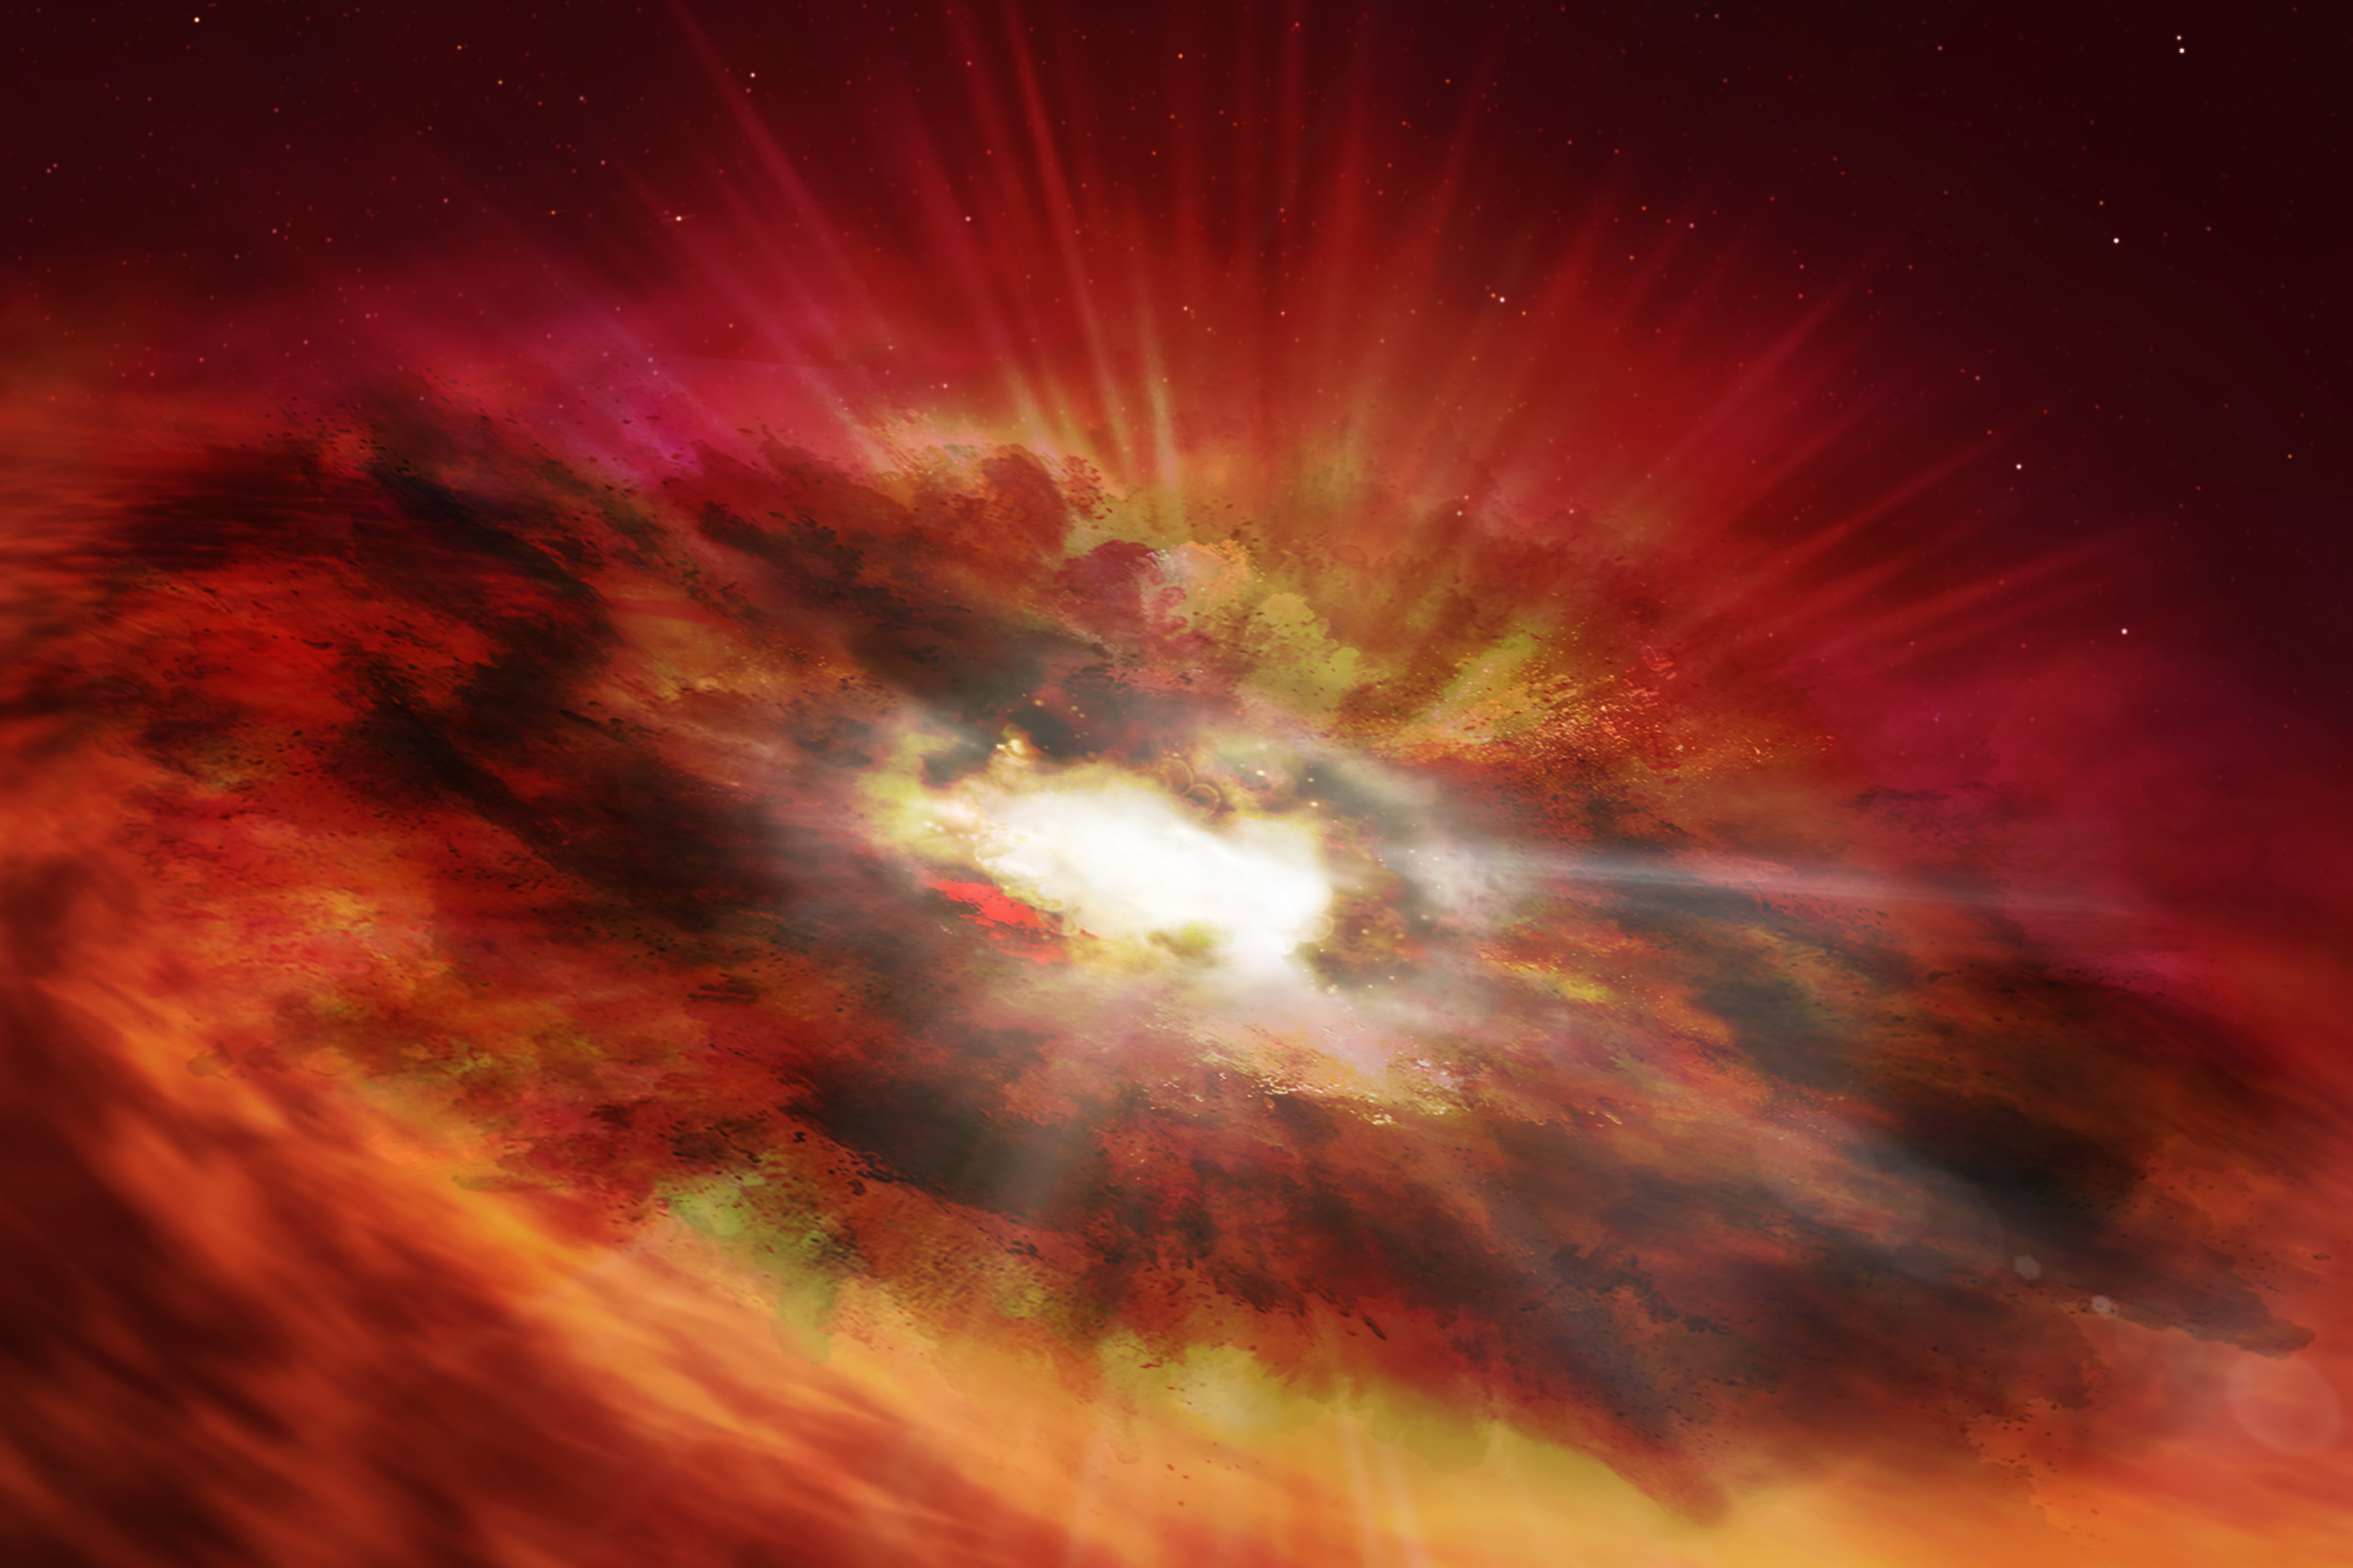

Artist’s Impression of GNz7q

An international team of astronomers using archival data from the NASA/ESA Hubble Space Telescope and other space- and ground-based observatories have discovered a unique object in the distant, early Universe that is a crucial link between young star-forming galaxies and the earliest supermassive black holes. This object is the first of its kind to be discovered so early in the Universe’s history, and had been lurking unnoticed in one of the best-studied areas of the night sky.

Current theories predict that supermassive black holes begin their lives in the dust-shrouded cores of vigorously star-forming “starburst” galaxies before expelling the surrounding gas and dust and emerging as extremely luminous quasars. Whilst they are extremely rare, examples of both dusty starburst galaxies and luminous quasars have been detected in the early Universe. The team believes that GNz7q could be the “missing link” between these two classes of objects.

Credit: ESA/Hubble, N. Bartmann